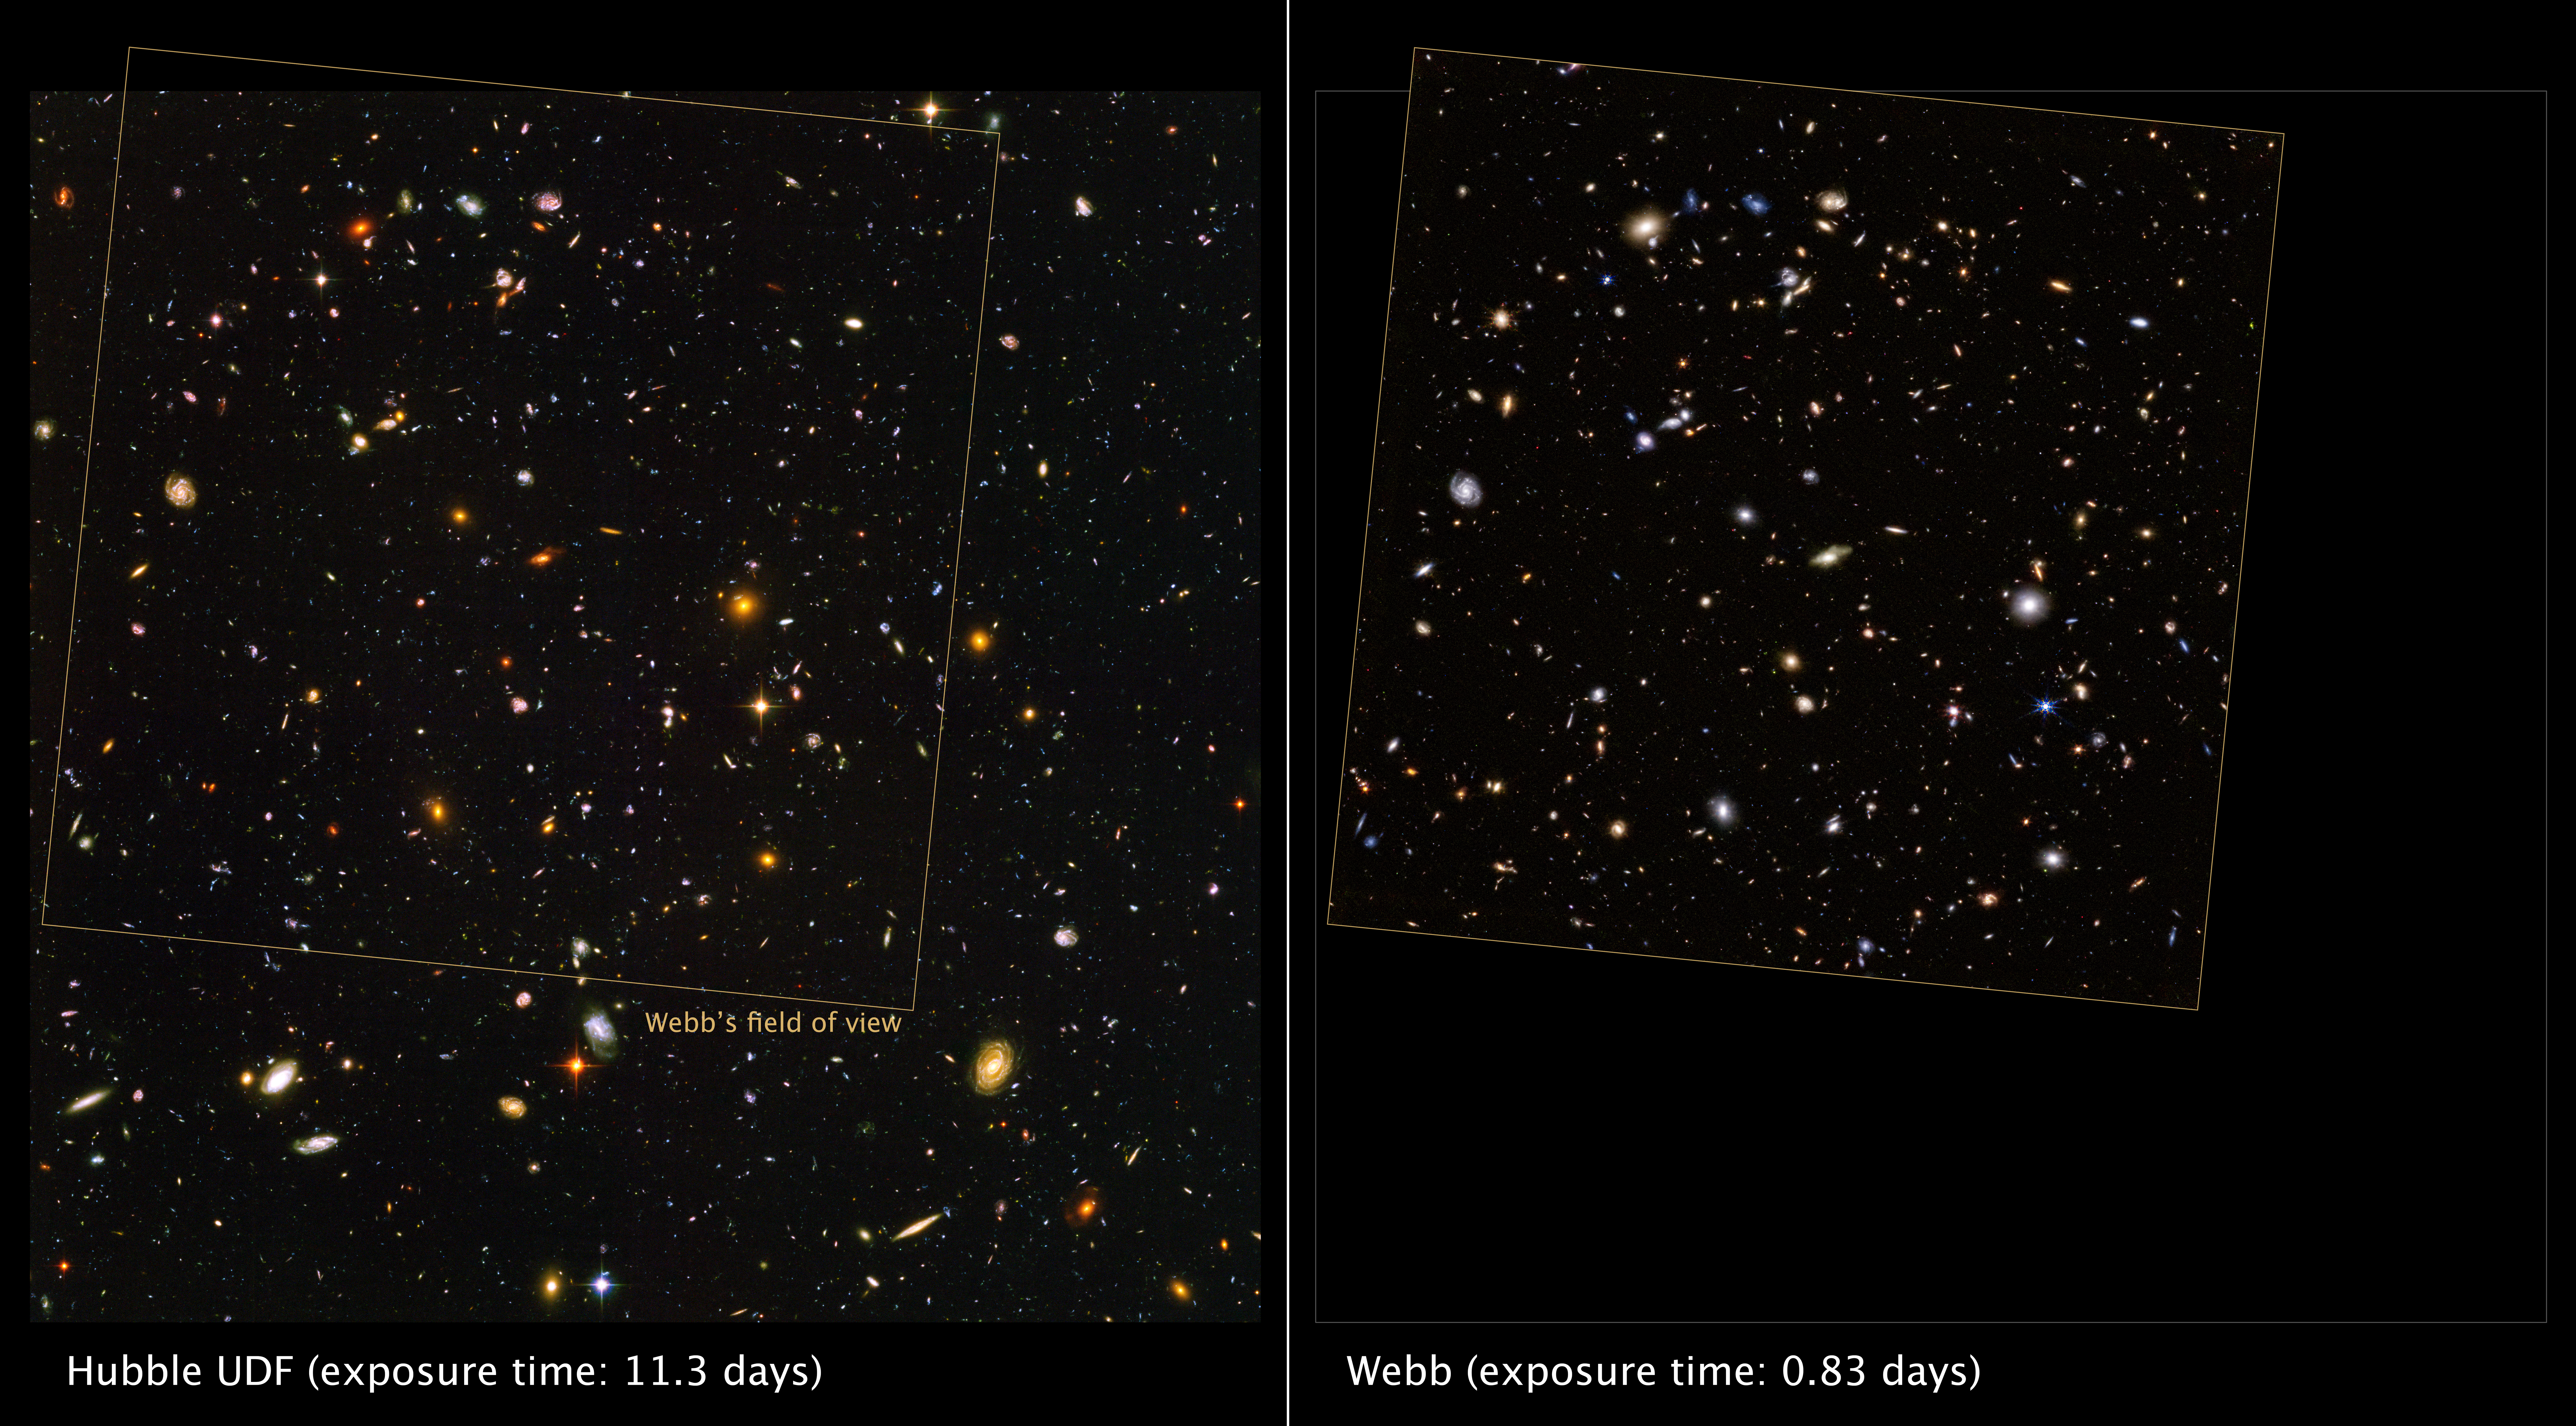

Webb observes the Hubble Ultra Deep Field

On 11 October 2022, the NASA/ESA/CSA James Webb Space Telescope spent over 20 hours observing the long-studied Ultra Deep Field of the NASA/ESA Hubble Space Telescope for the first time. The general observer program (GO 1963) focused on analysing the field in wavelengths between approximately 2 and 4 microns. This image was taken by the Near Infrared Camera (NIRCam). Hubble’s view is presented on the left and Webb’s view is presented on the right.

The Webb image observes the field at depths comparable to Hubble – revealing galaxies of similar faintness – in just one-tenth as much observing time. It includes 1.8-micron light shown in blue, 2.1-micron light shown in green, 4.3-micron light shown in yellow, 4.6-micron light shown in orange, and 4.8-micron light shown in red (filters F182M, F210M, F430M, F460M, and F480M).

The Hubble image required 800 exposures taken over the course of 400 Hubble orbits around Earth. The total amount of exposure time was 11.3 days, taken between 24 September 2003 and 16 January 2004.

Note: This post highlights data from Webb science in progress, which has not yet been through the peer-review process.

Credit: NASA, ESA, CSA, J. DePasquale (STScI).